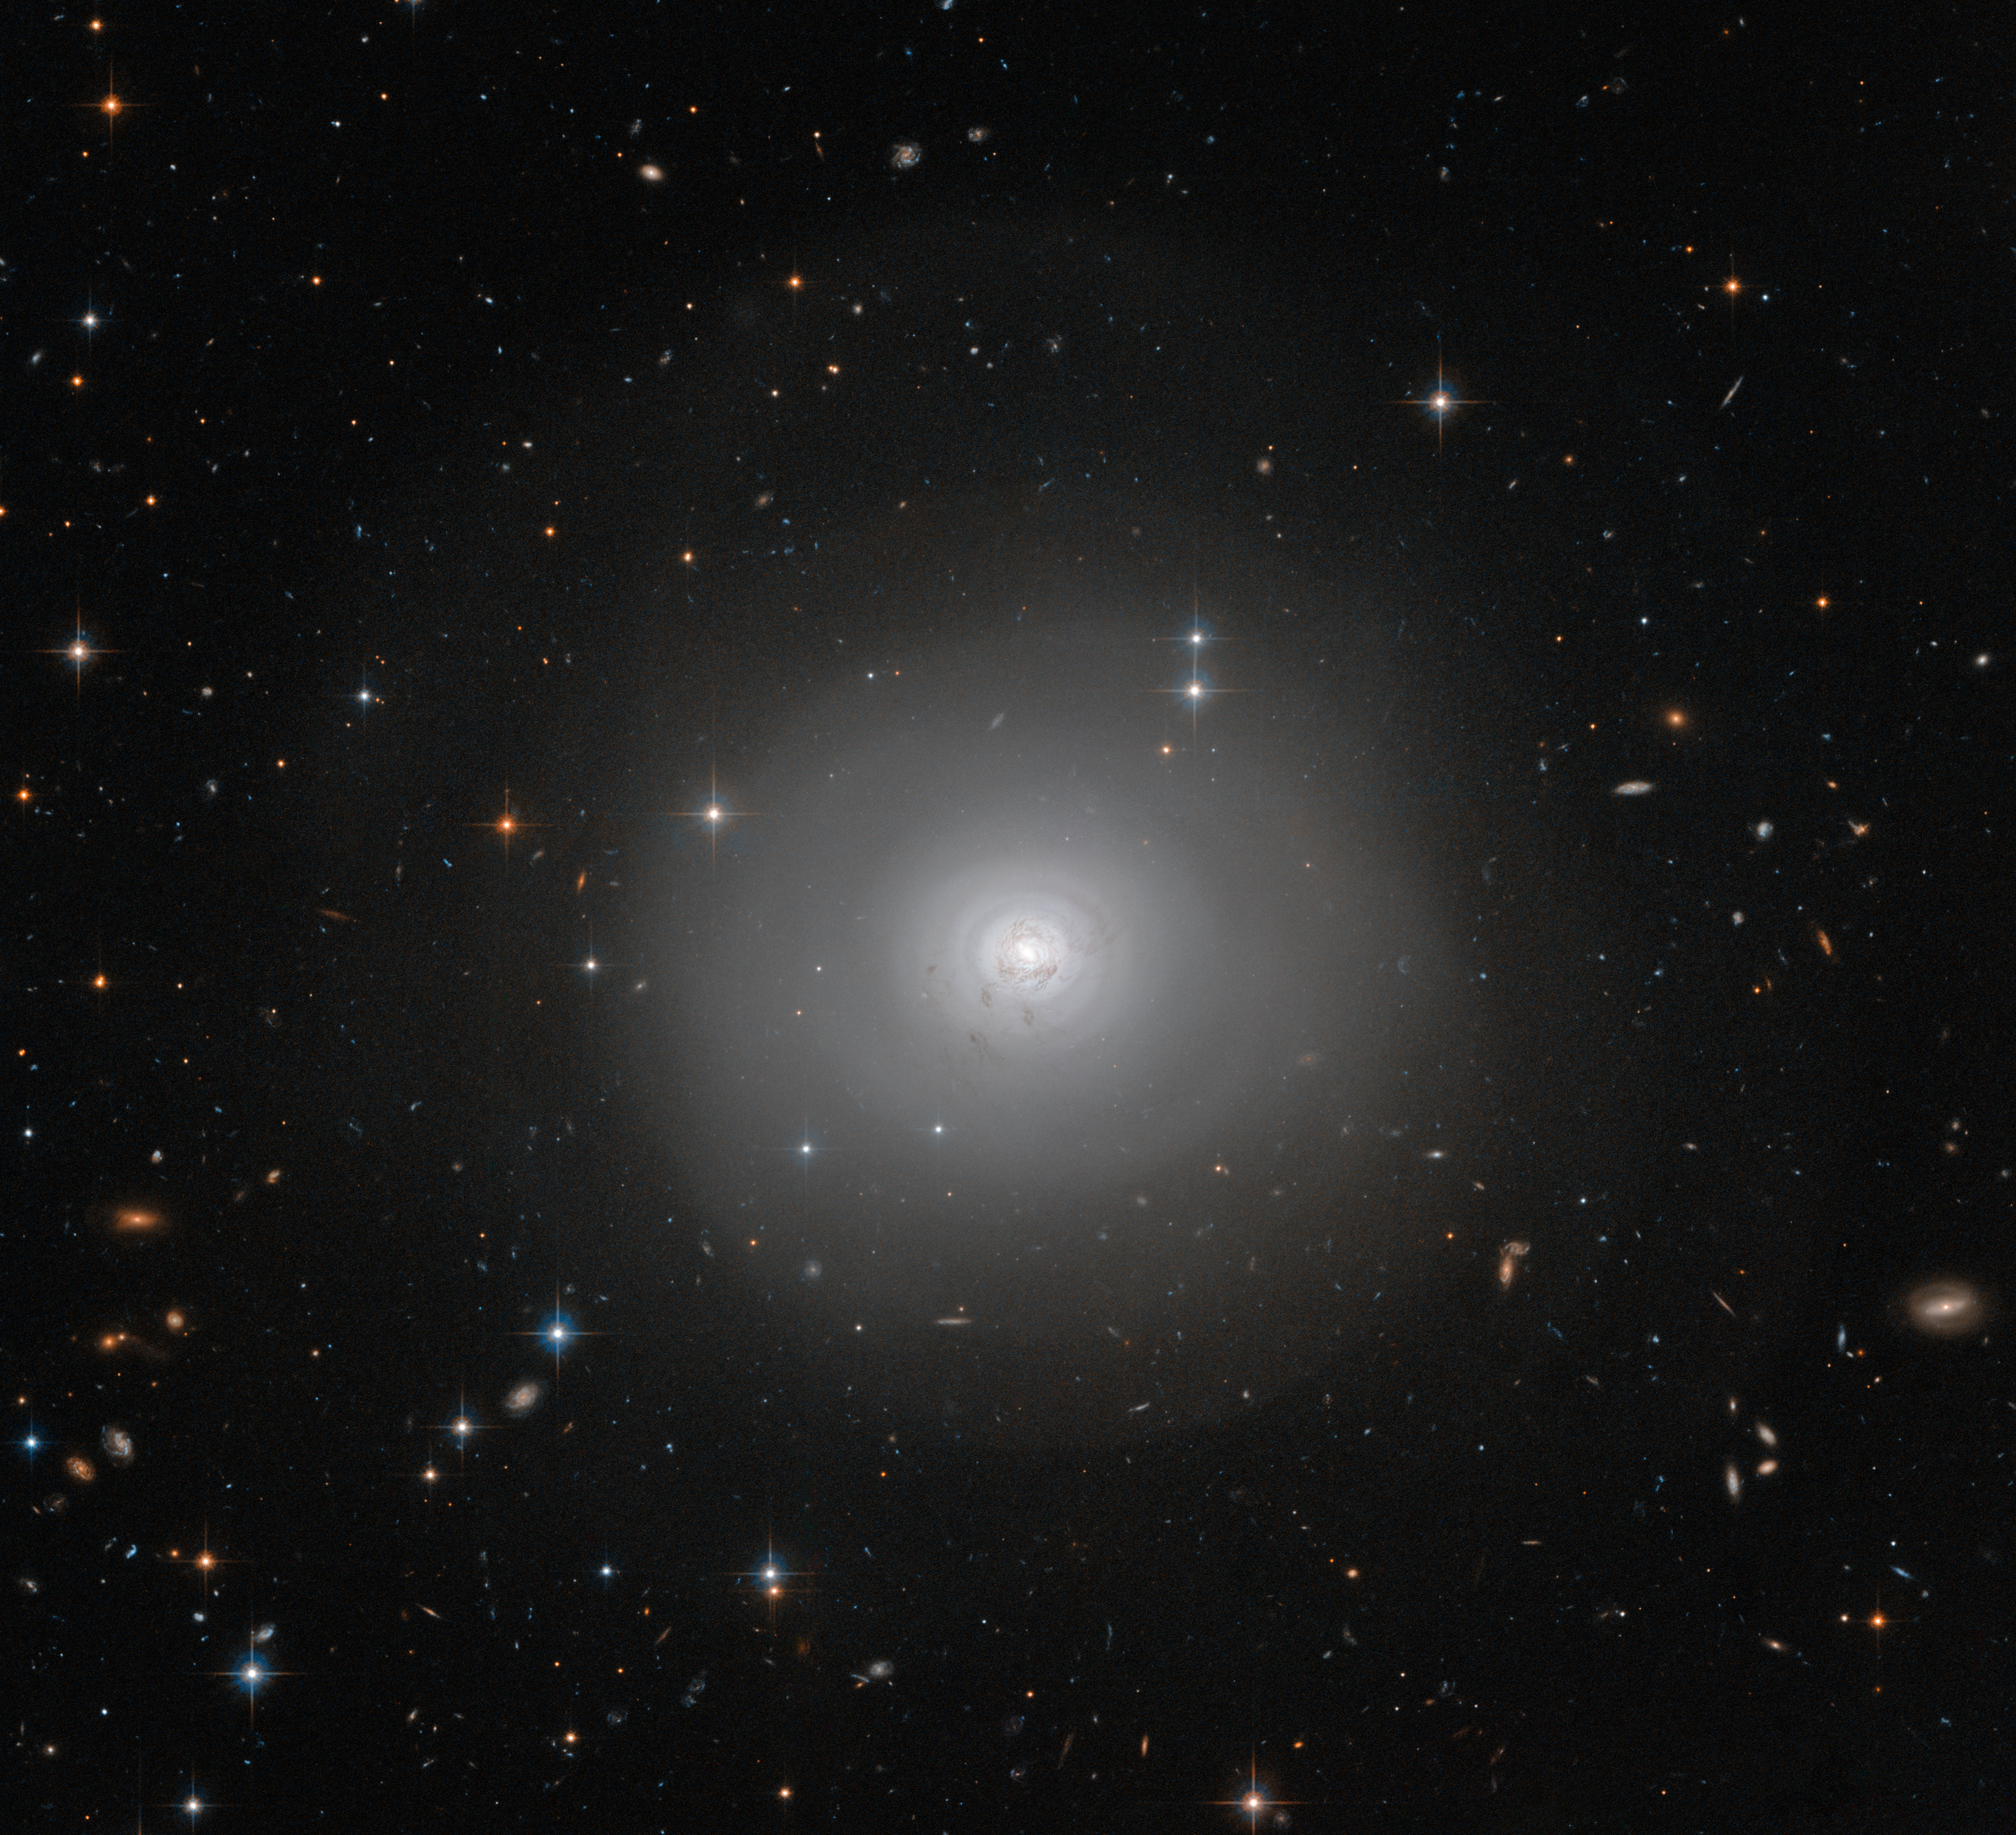

Dark, dusty shells

The NASA/ESA Hubble Space Telescope has captured this image of PGC 10922, an example of a lenticular galaxy — a galaxy type that lies on the border between ellipticals and spirals.

Seen face-on, the image shows the disc and tightly-wound spiral structures of dark dust encircling the bright centre of the galaxy. There is also a remarkable outer halo of faint wide arcs or shells extending outwards, covering much of the picture. These are likely to have been formed by a gravitational encounter or even a merger with another galaxy. Some dust also appears to have escaped from the central structure and has spread out across the inner shells.

An extraordinarily rich background of more remote galaxies can also be seen in the image.

A version of this image was entered into the Hubble's Hidden Treasures image processing competition by contestant Judy Schmidt.

Credit: ESA/Hubble & NASA Acknowledgement: Judy Schmidt